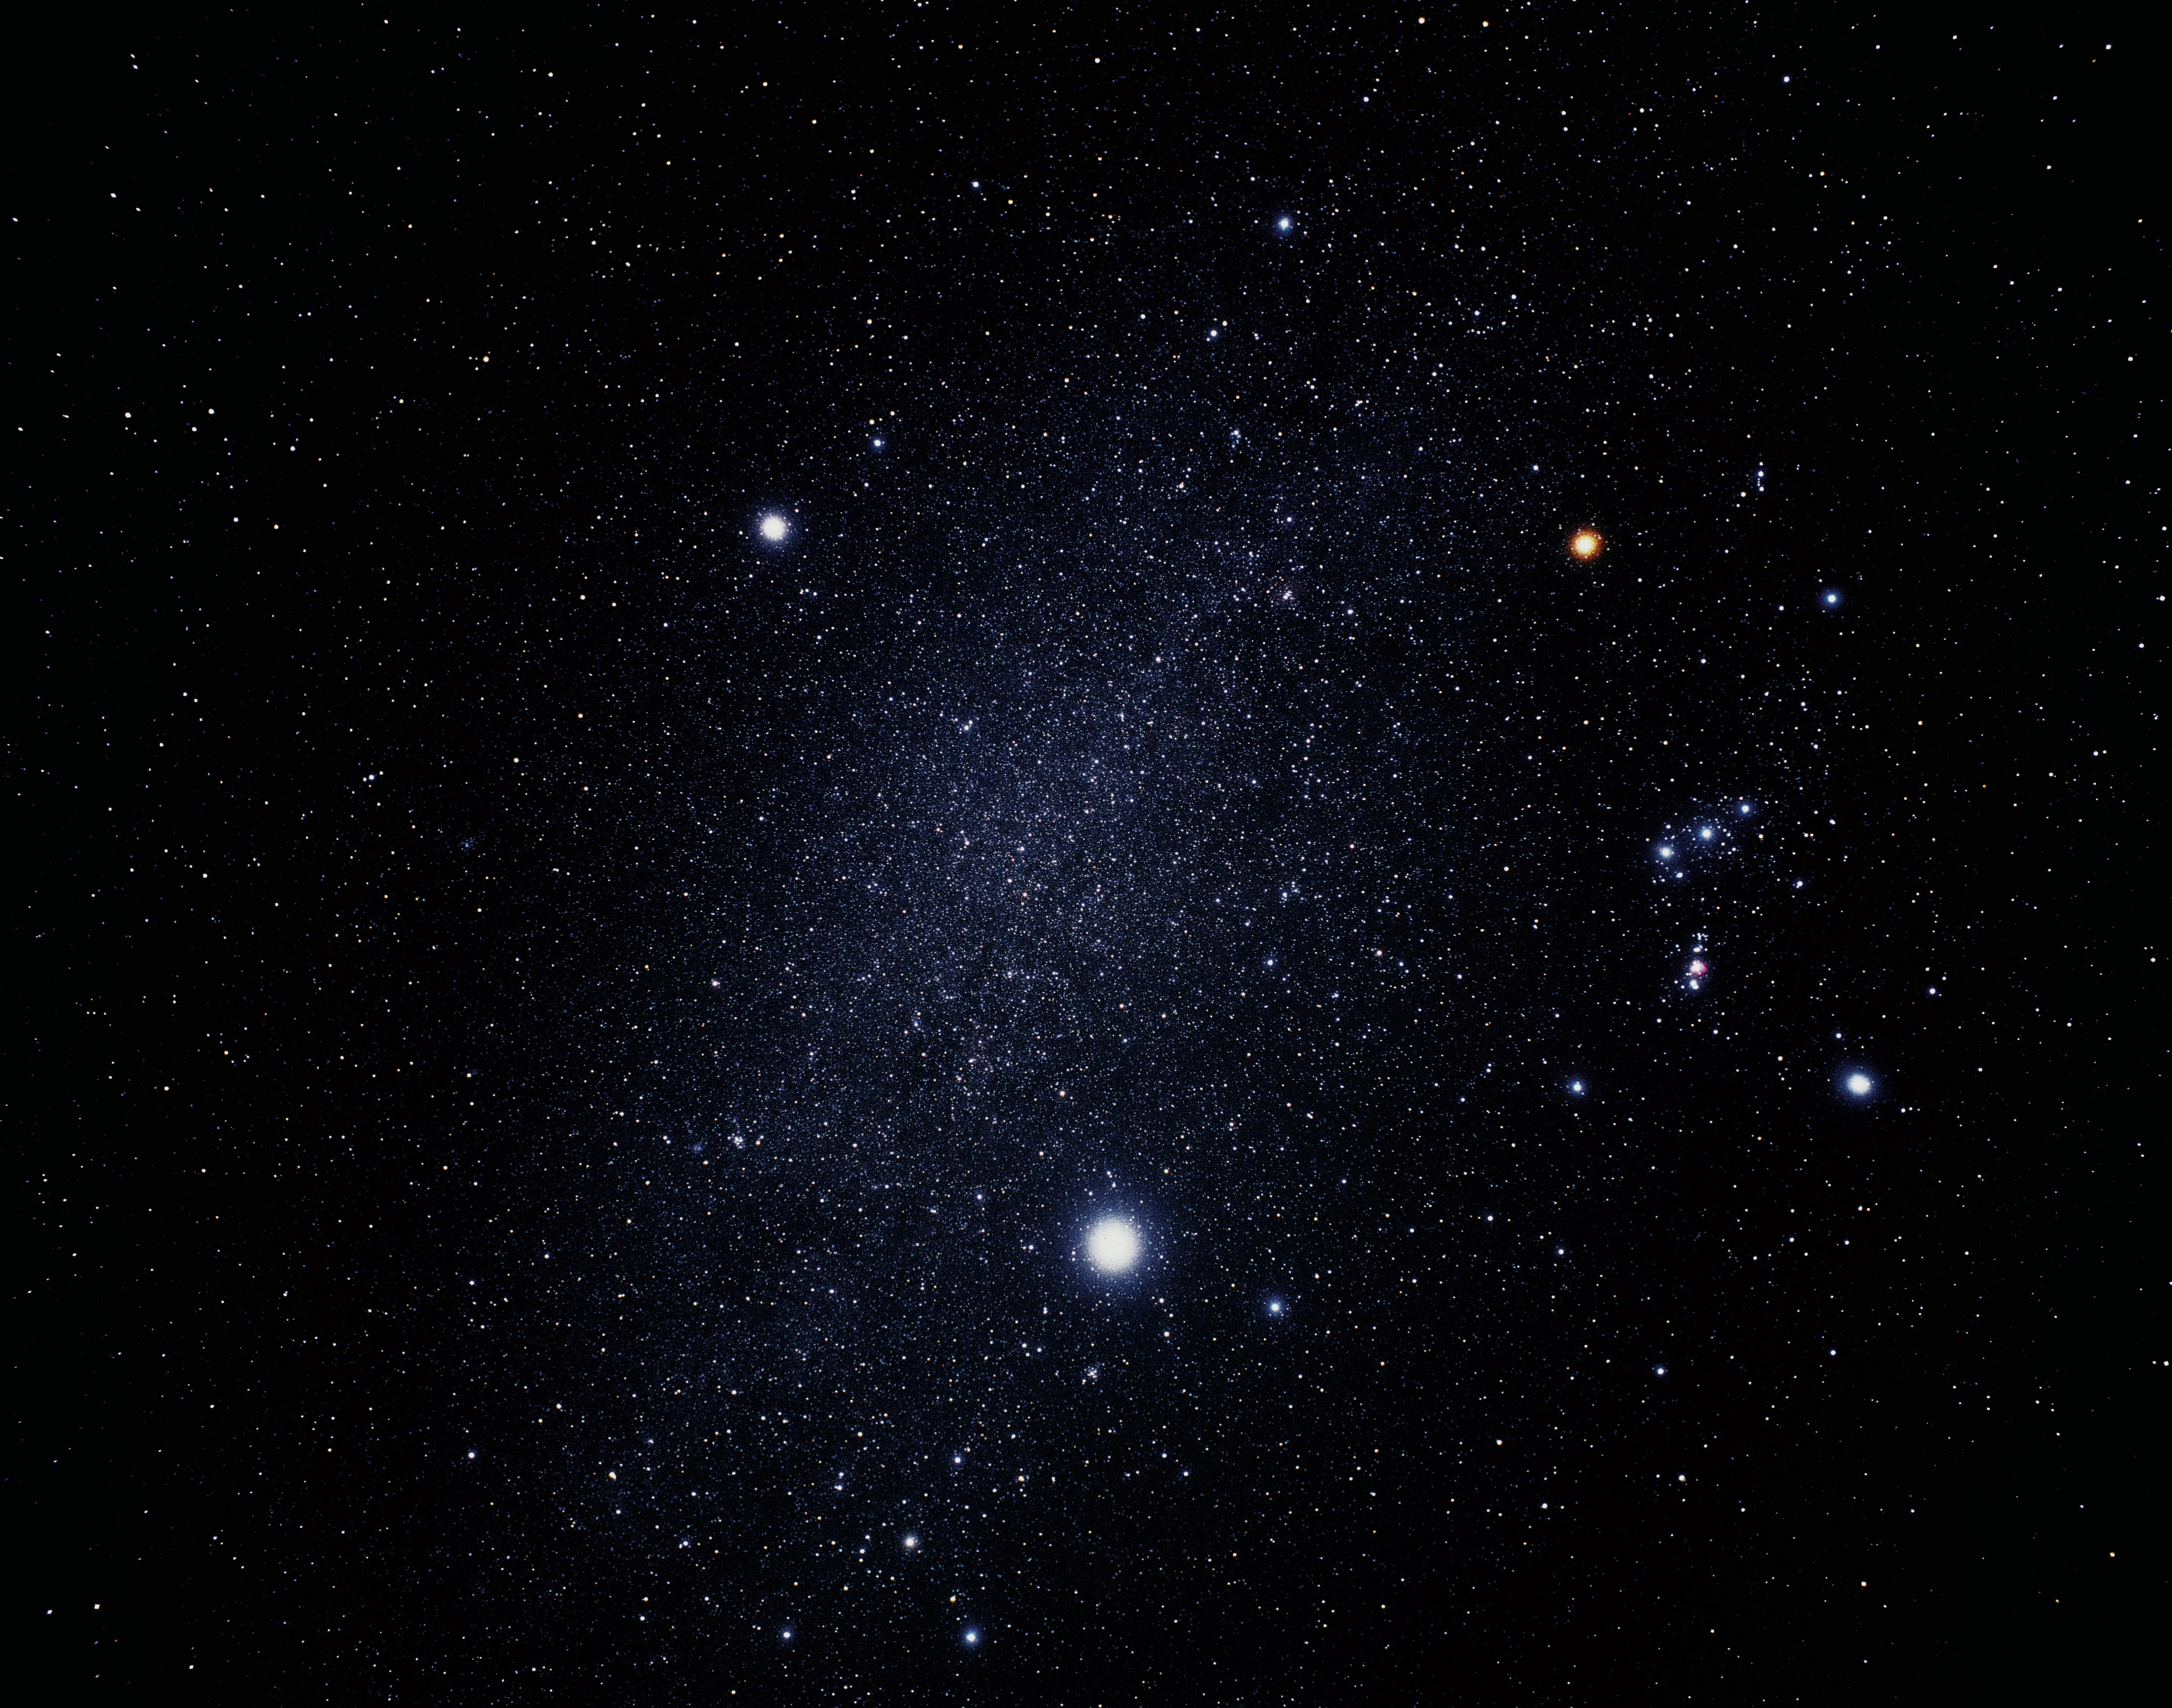

Ground-based image of Orion, Canis Minor and Canis major (ground-based image)

This ground-based image was taken by Japanese amateur astronomer Akira Fujii and shows the constellations Orion, Canis Minor and Canis major.

Credit: Akira Fujii